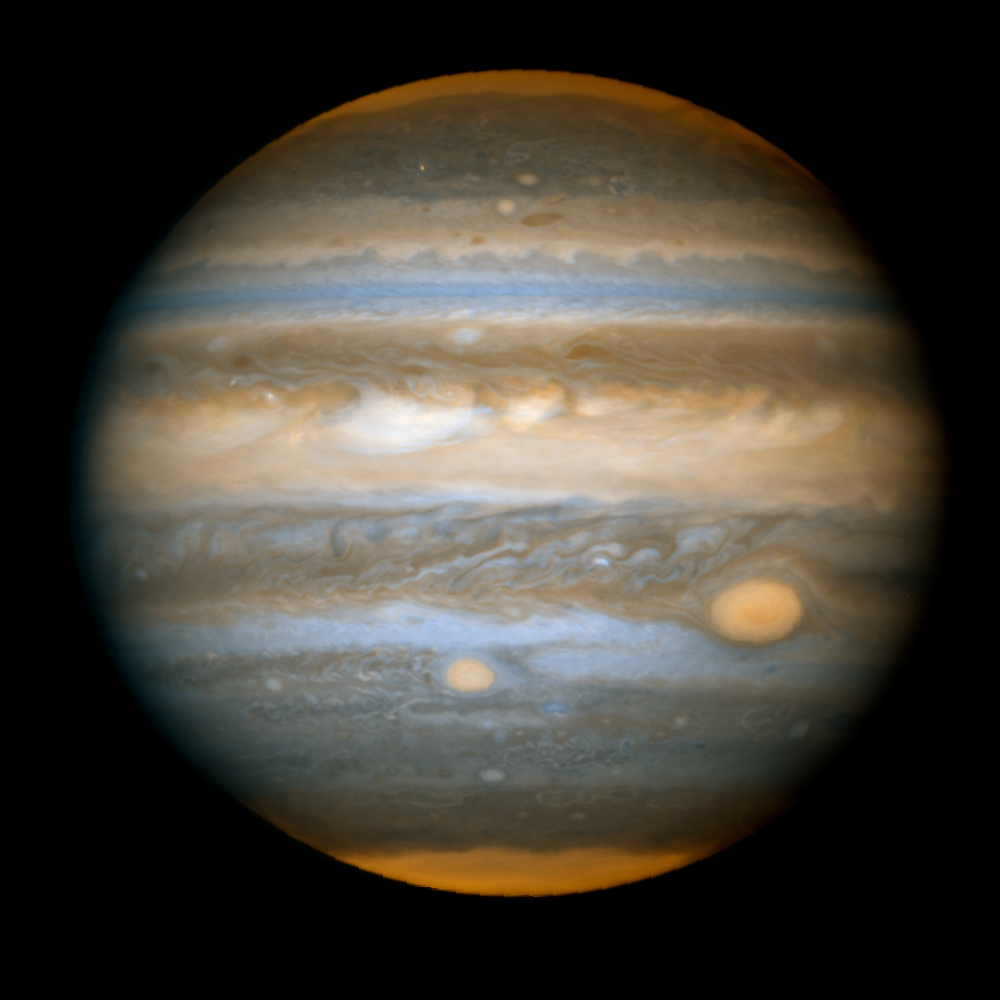

Jupiter's New Red Spot - HST ACS/WFC: April 16, 2006

Image of the full disk of Jupiter from ACS/WFC at 18:42 UT, April 16, 2006. Two filters are shown in red/orange (F892N, near-IR strong methane band) and blue/cyan (F502N continuum/cyan light). The Hubble group that conducted this observation is led jointly by Imke de Pater (UCB Astronomy) and Philip Marcus (UCB Mechanical Engineering). Other team members are Michael Wong (UCB Astronomy), Xylar Asay-Davis (UCB Mechanical Engineering), and Christopher Go, an amateur astronomer with the Astronomical League of the Philippines.

Credit: NASA, ESA, I. de Pater and M. Wong (University of California, Berkeley)